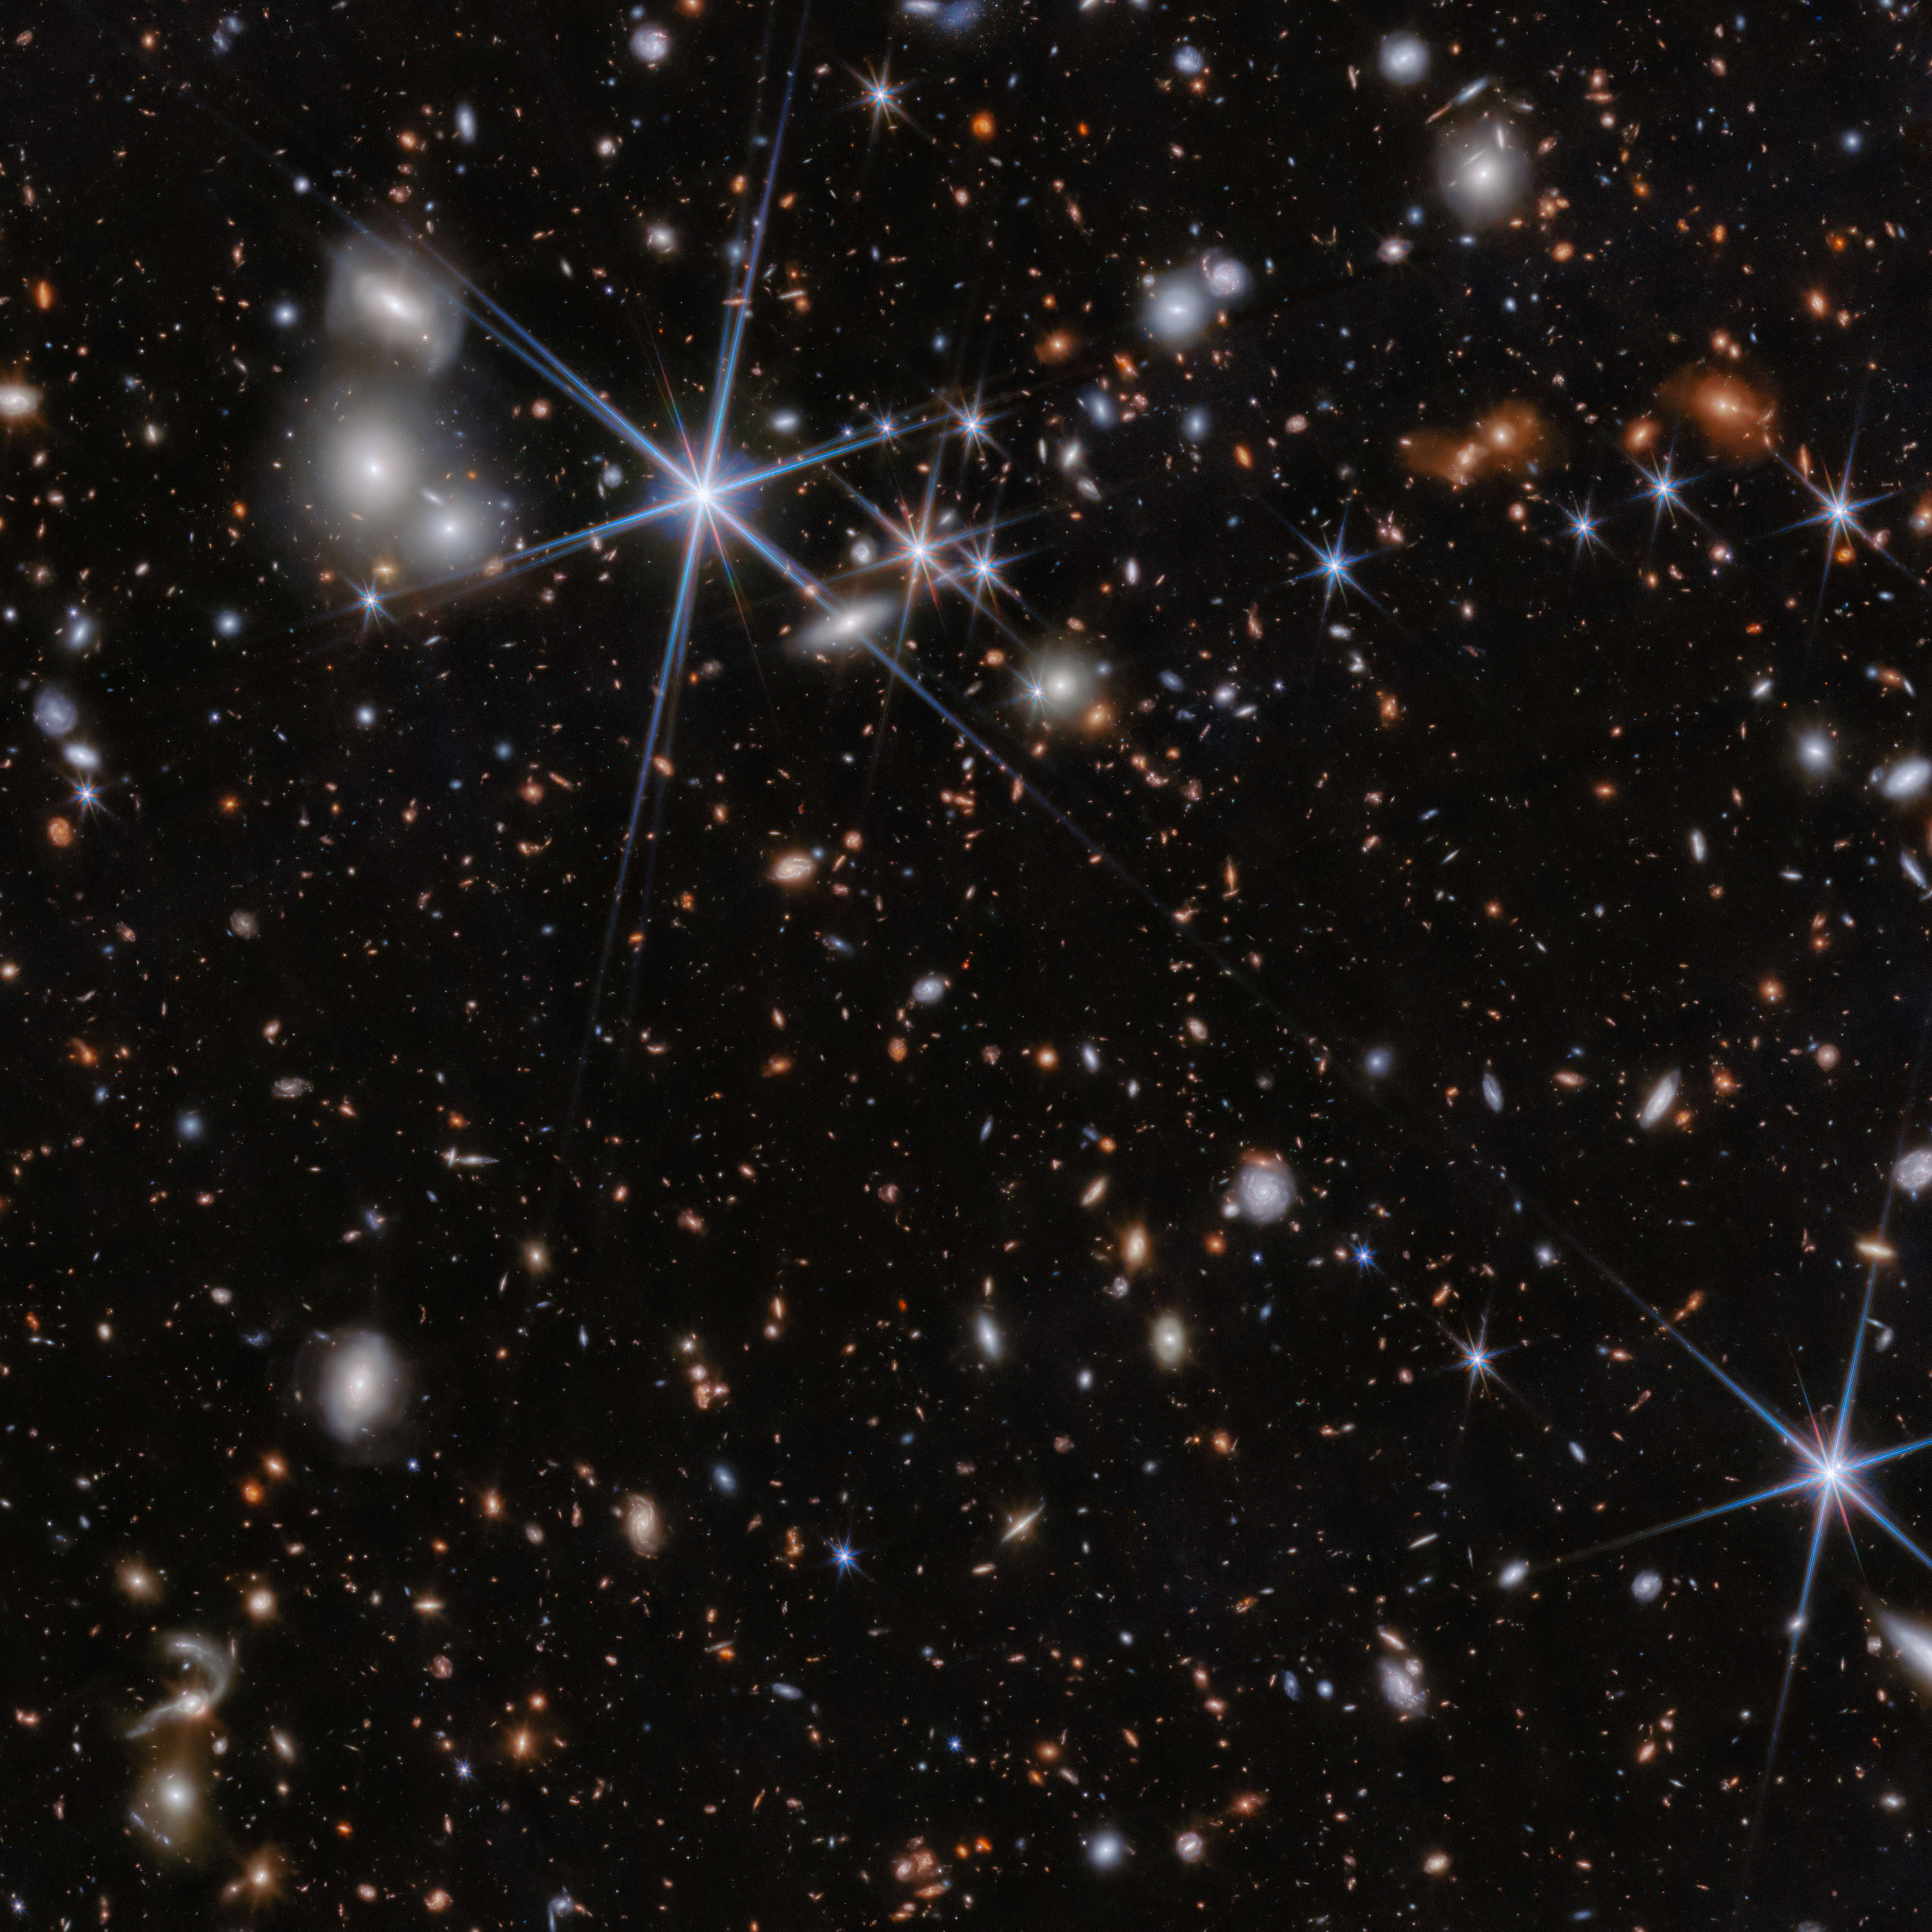

ZS7 environment (NIRcam image)

This image shows the environment of the galaxy system ZS7 from the JWST PRIMER programme (PI: J. Dunlop) as seen by Webb's NIRCam instrument.

New research using the NIRSpec instrument on the NASA/ESA/CSA James Webb Space Telescope has determined the system to be evidence of an ongoing merger of two galaxies and their massive black holes when the Universe was only 740 million years old. This marks the most distant detection of a black hole merger ever obtained and the first time that this phenomenon has been detected so early in the Universe.

The team has found evidence for very dense gas with fast motions in the vicinity of the black hole, as well as hot and highly ionised gas illuminated by the energetic radiation typically produced by black holes in their accretion episodes. Webb also allowed the team to spatially separate the two black holes and determined that one of the two black holes has a mass that is 50 million times the mass of the Sun. The mass of the other black hole is likely similar, although it is harder to measure because this second black hole is buried in dense gas.

Credit: ESA/Webb, NASA, CSA, J. Dunlop, D. Magee, P. G. Pérez-González, H. Übler, R. Maiolino, et. al